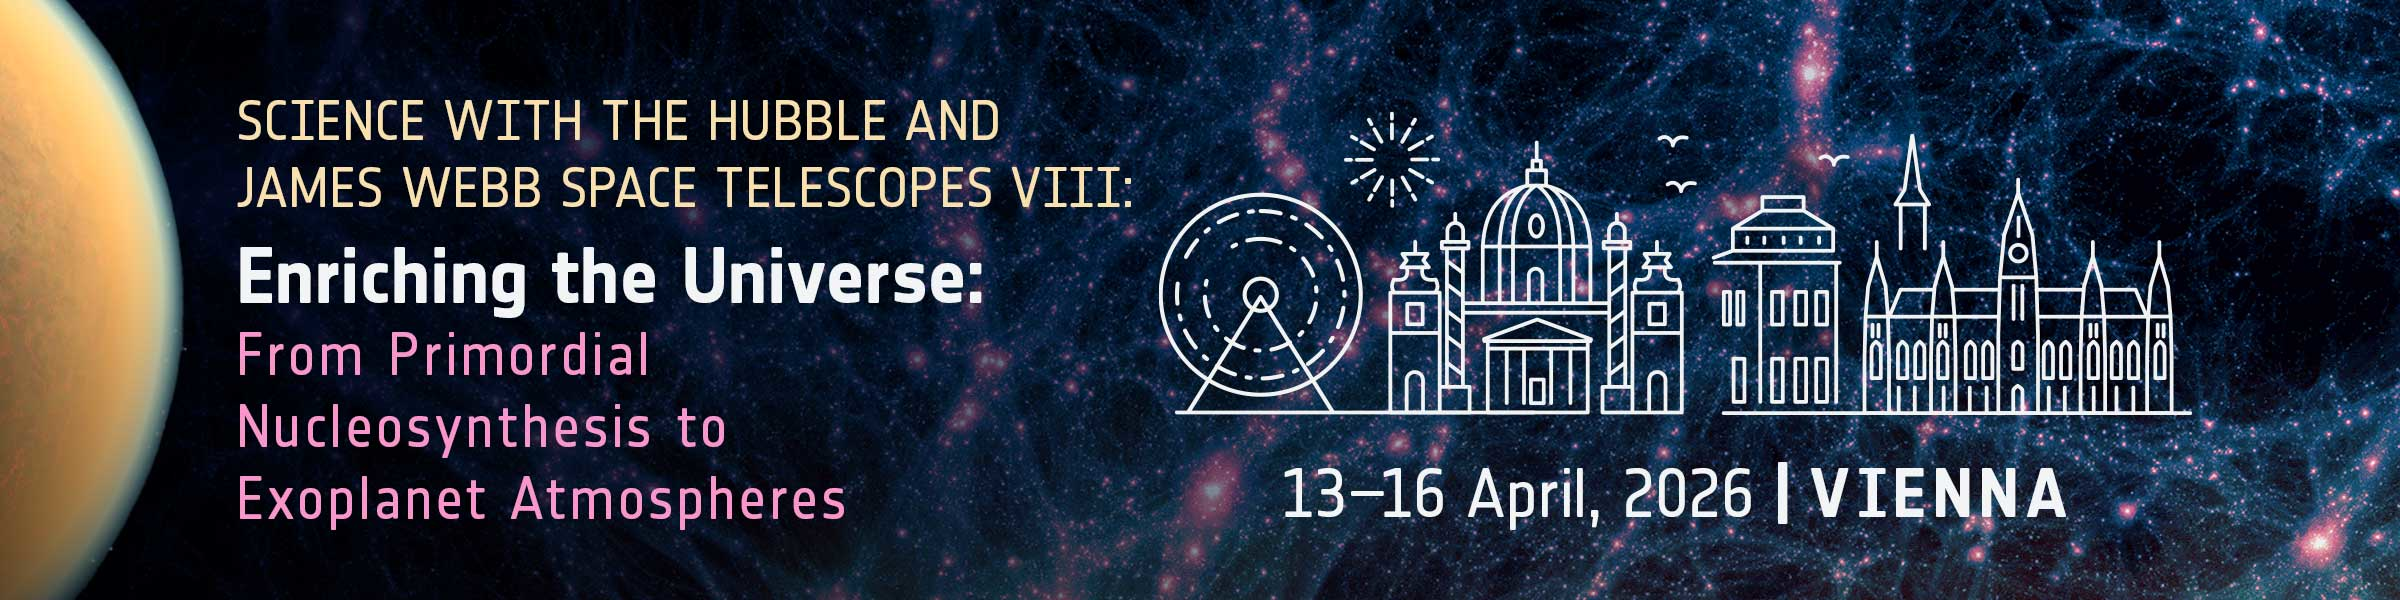

Announcement of the Hubble & Webb “Enriching the Universe” Conference

Banner image for the conference, “Enriching the Universe: From Primordial Nucleosynthesis to Exoplanet Atmospheres”, which will be held in Vienna, Austria on 13 to 16 April 2026. This is an ESA-sponsored conference, in collaboration with STScI, which highlights science with Hubble and Webb.

Credit: NASA, ESA, STScI